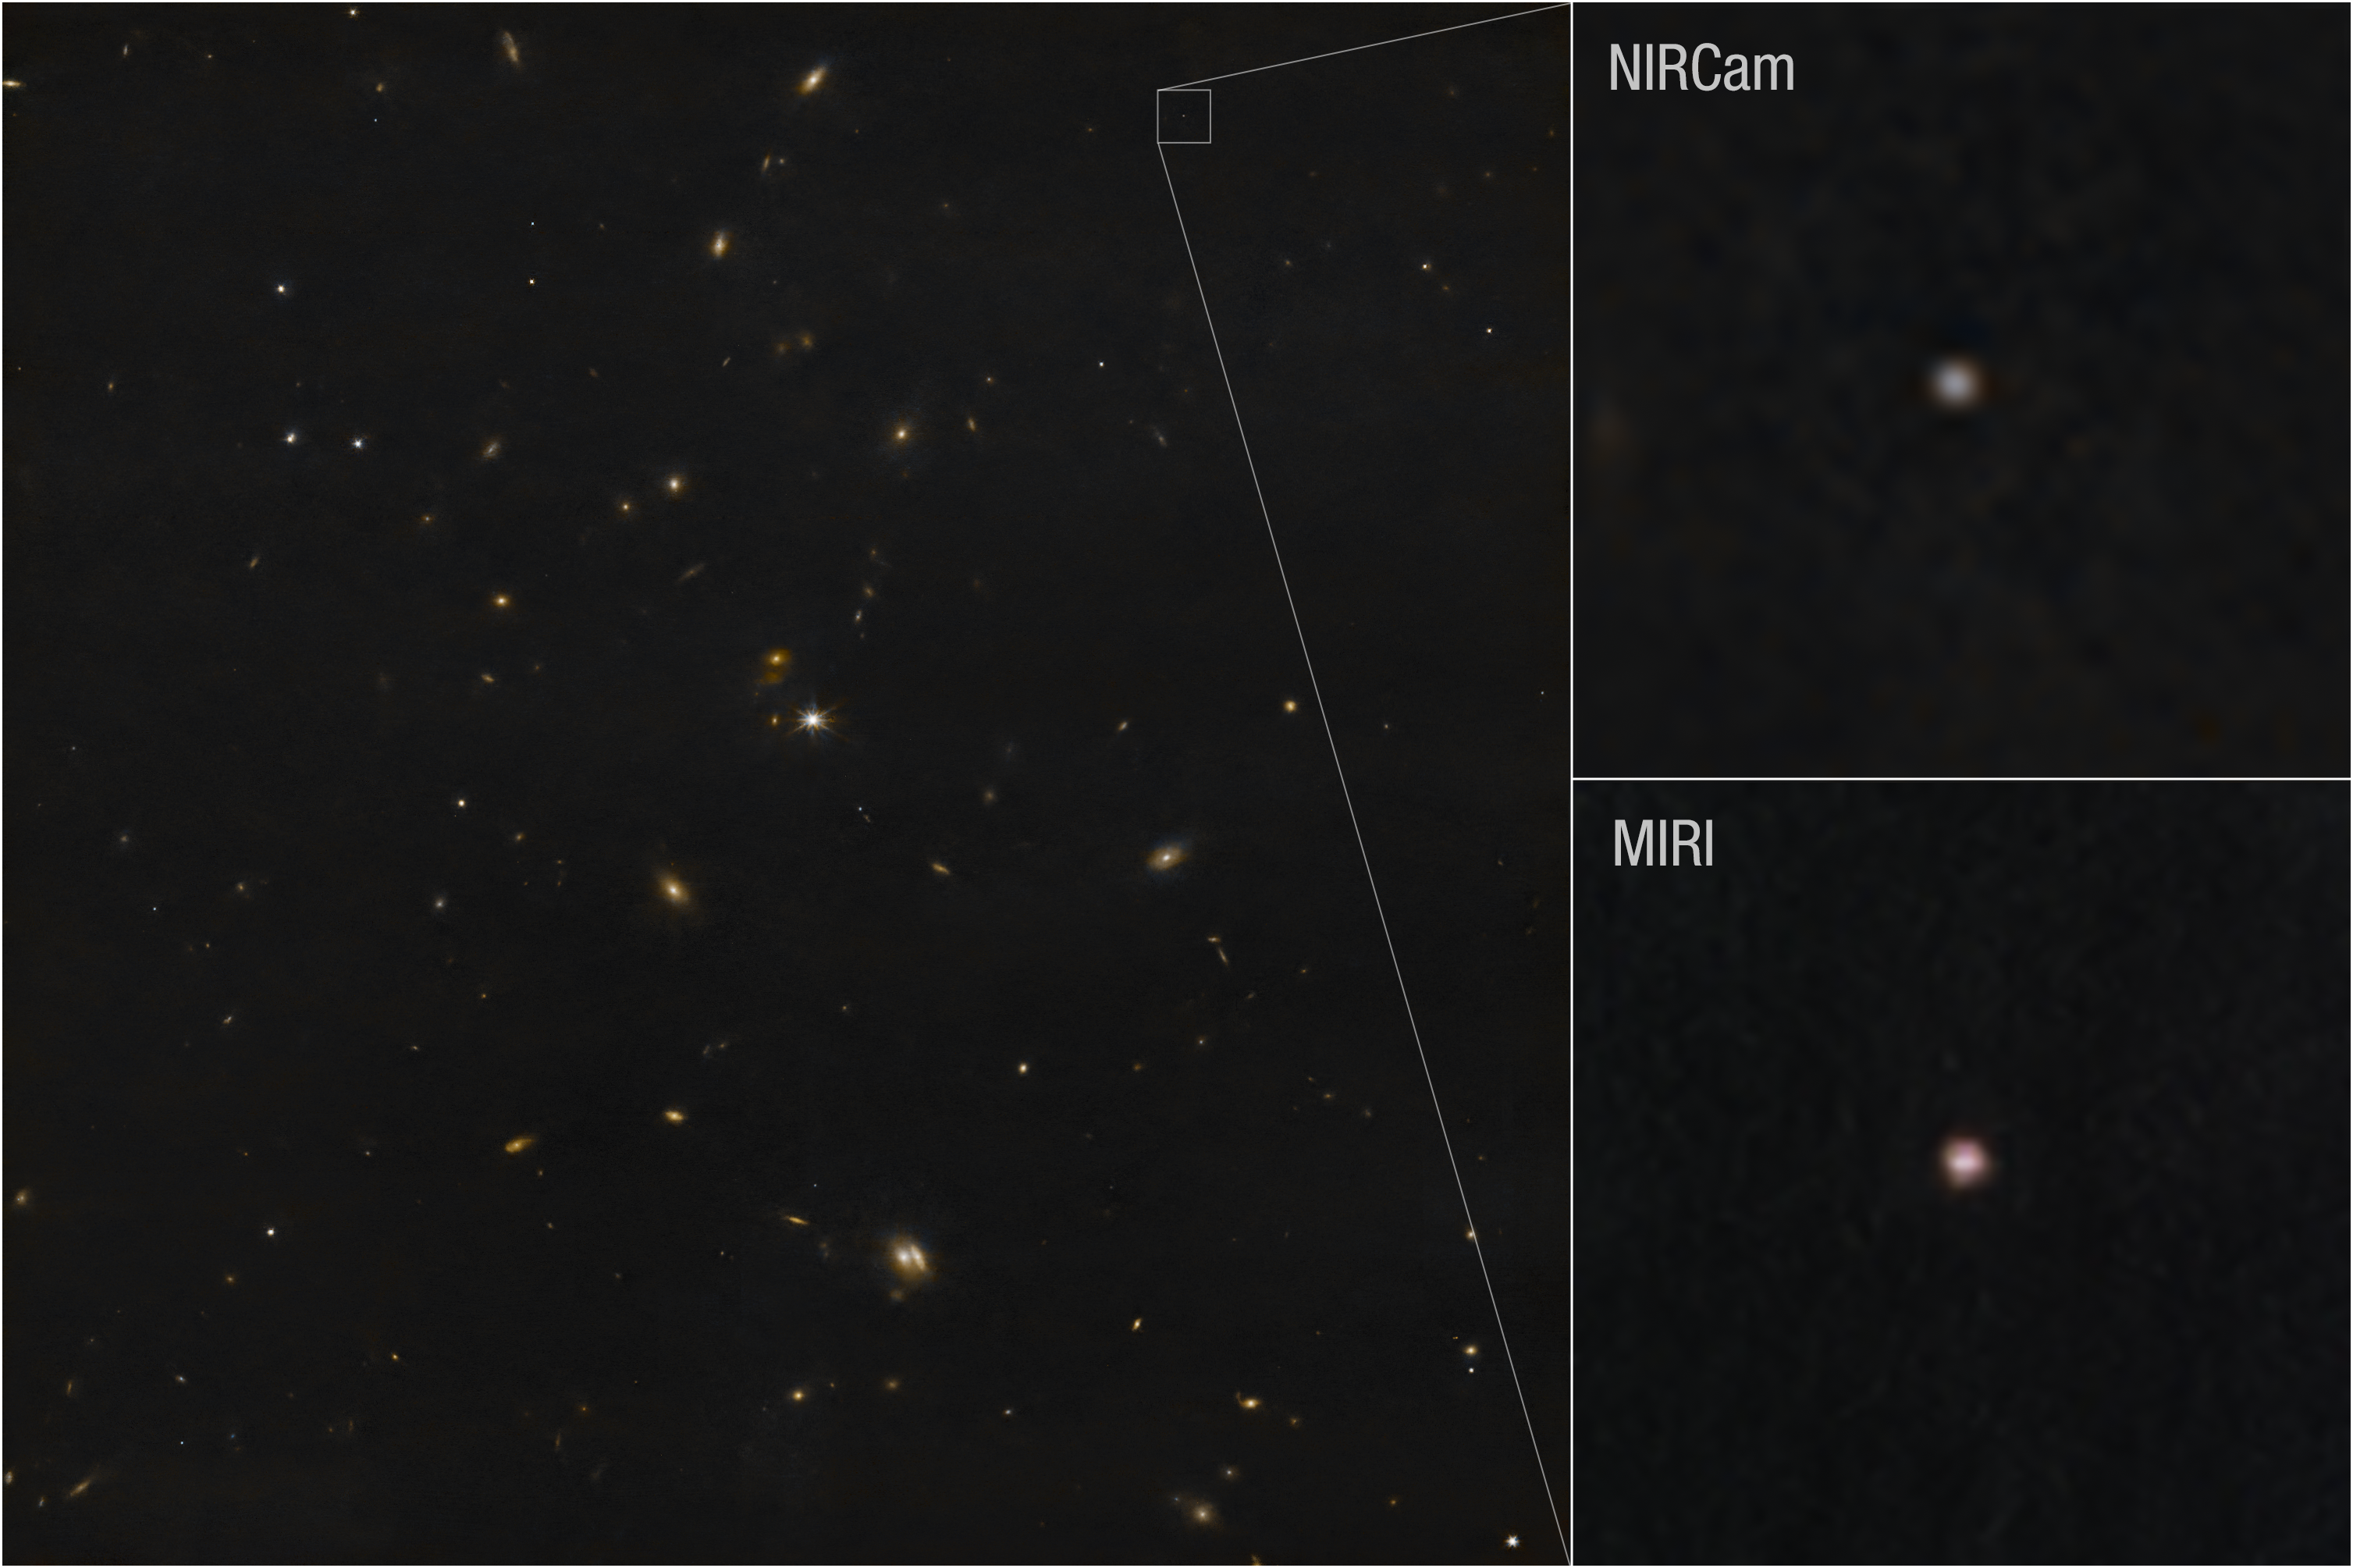

Asteroid 2024 YR4 (NIRCam and Webb images)

This image shows Webb’s recent observation of the asteroid 2024 YR4 using both its NIRCam (Near-Infrared Camera) and MIRI (Mid-Infrared Instrument). Data from NIRCam shows reflected light, while the MIRI observations show thermal light.

On 8 March 2025, the NASA/ESA/CSA James Webb Space Telescope turned its watchful eye toward asteroid 2024 YR4, which we now know poses no significant threat to Earth in 2032 and beyond.

This is the smallest object targeted by Webb to date, and one of the smallest objects to have its size directly measured.

Observations were taken to study the thermal properties of 2024 YR4, including how quickly it heats up and cools down and how hot it is at its current distance from the Sun. These measurements indicate that this asteroid does not share properties observed in larger asteroids. This is likely a combination of its fast spin and lack of fine-grained sand on its surface. Further research is needed, however this is considered consistent with a surface dominated by rocks that are roughly fist-sized or larger.

Webb’s observations indicate that the asteroid measures roughly 60 meters (comparable to the height of a 15-story building).

The new observations from Webb not only provide unique information about 2024 YR4’s size, but can also complement ground-based observations of the object's position to help improve our understanding of the object’s orbit and future trajectory.

Note: This post highlights data from Webb science in progress, which has not yet been through the peer-review process.

Credit: NASA, ESA, CSA, STScI, A Rivkin (JHU APL)